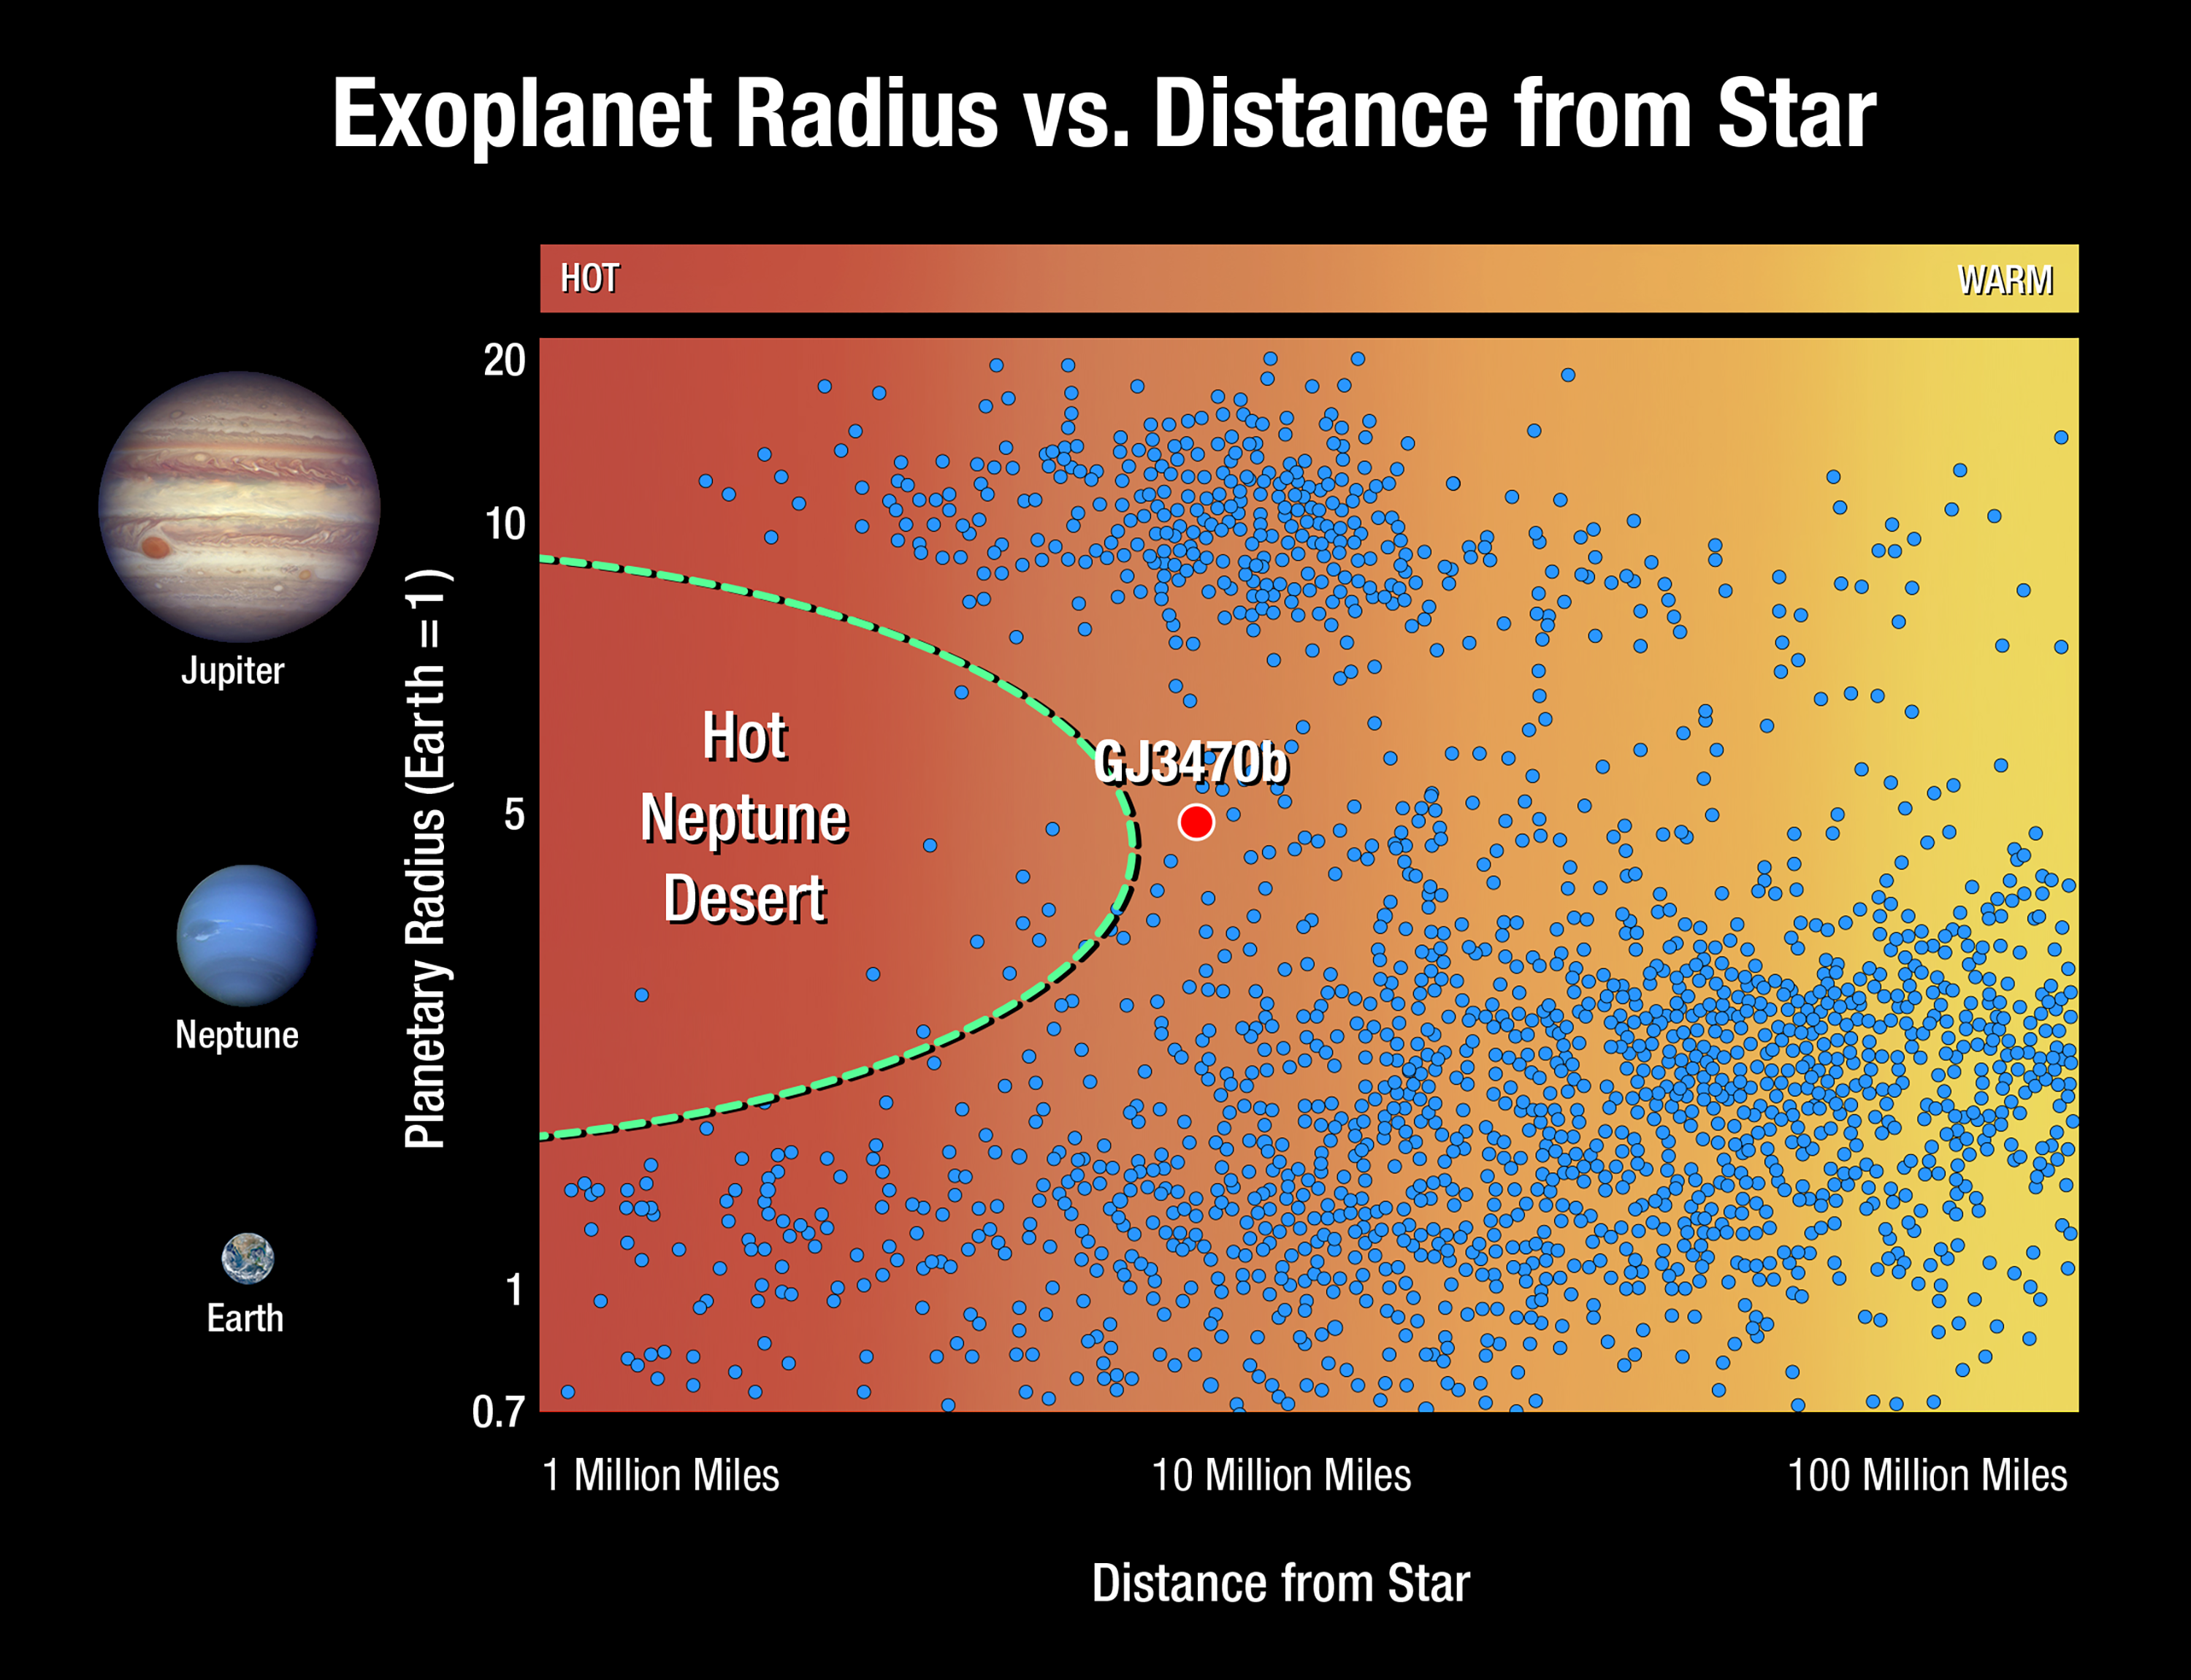

Exoplanet radius versus distance from star

This graphic plots exoplanets based on their size and distance from their star. Each dot represents an exoplanet. Planets the size of Jupiter (located at the top of the graphic) and planets the size of Earth and so-called super-Earths (at the bottom) are found both close to and far from their star. But planets the size of Neptune (in the middle of the plot) are scarce close to their star. This so-called desert of hot Neptunes shows that such alien worlds are rare, or, they were plentiful at one time, but have since disappeared. The detection that GJ 3470b, a warm Neptune at the border of the desert, is fast losing its atmosphere suggests that hotter Neptunes may have eroded down to smaller, rocky super-Earths.

Credit: NASA, ESA, and A. Feild (STScI)